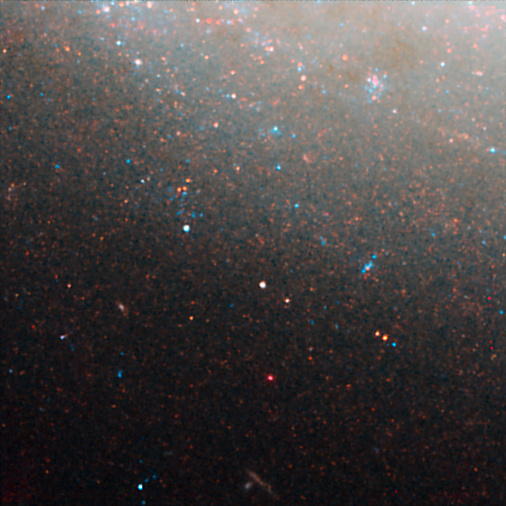

NGC 3021 NICMOS/ACS detail 3

This image is part of a montage of images of the spiral galaxy NGC 3021 taken by the NASA/ESA Hubble Space Telescope. Hubble made precise measurements of Cepheid variable stars in the galaxy, highlighted in this image. These stars pulsate at a rate that is matched closely to their intrinsic brightness. This makes them ideal for measuring intergalactic distances. The Cepheids are used to calibrate an even brighter milepost marker that can be used over greater distances, a Type Ia supernova. The supernova was observed in the galaxy in 1995. The image was taken with the Near Infrared Camera and Multi-Object Spectrometer (NICMOS).

Credit: NASA, ESA and A. Riess (STScI/JHU)